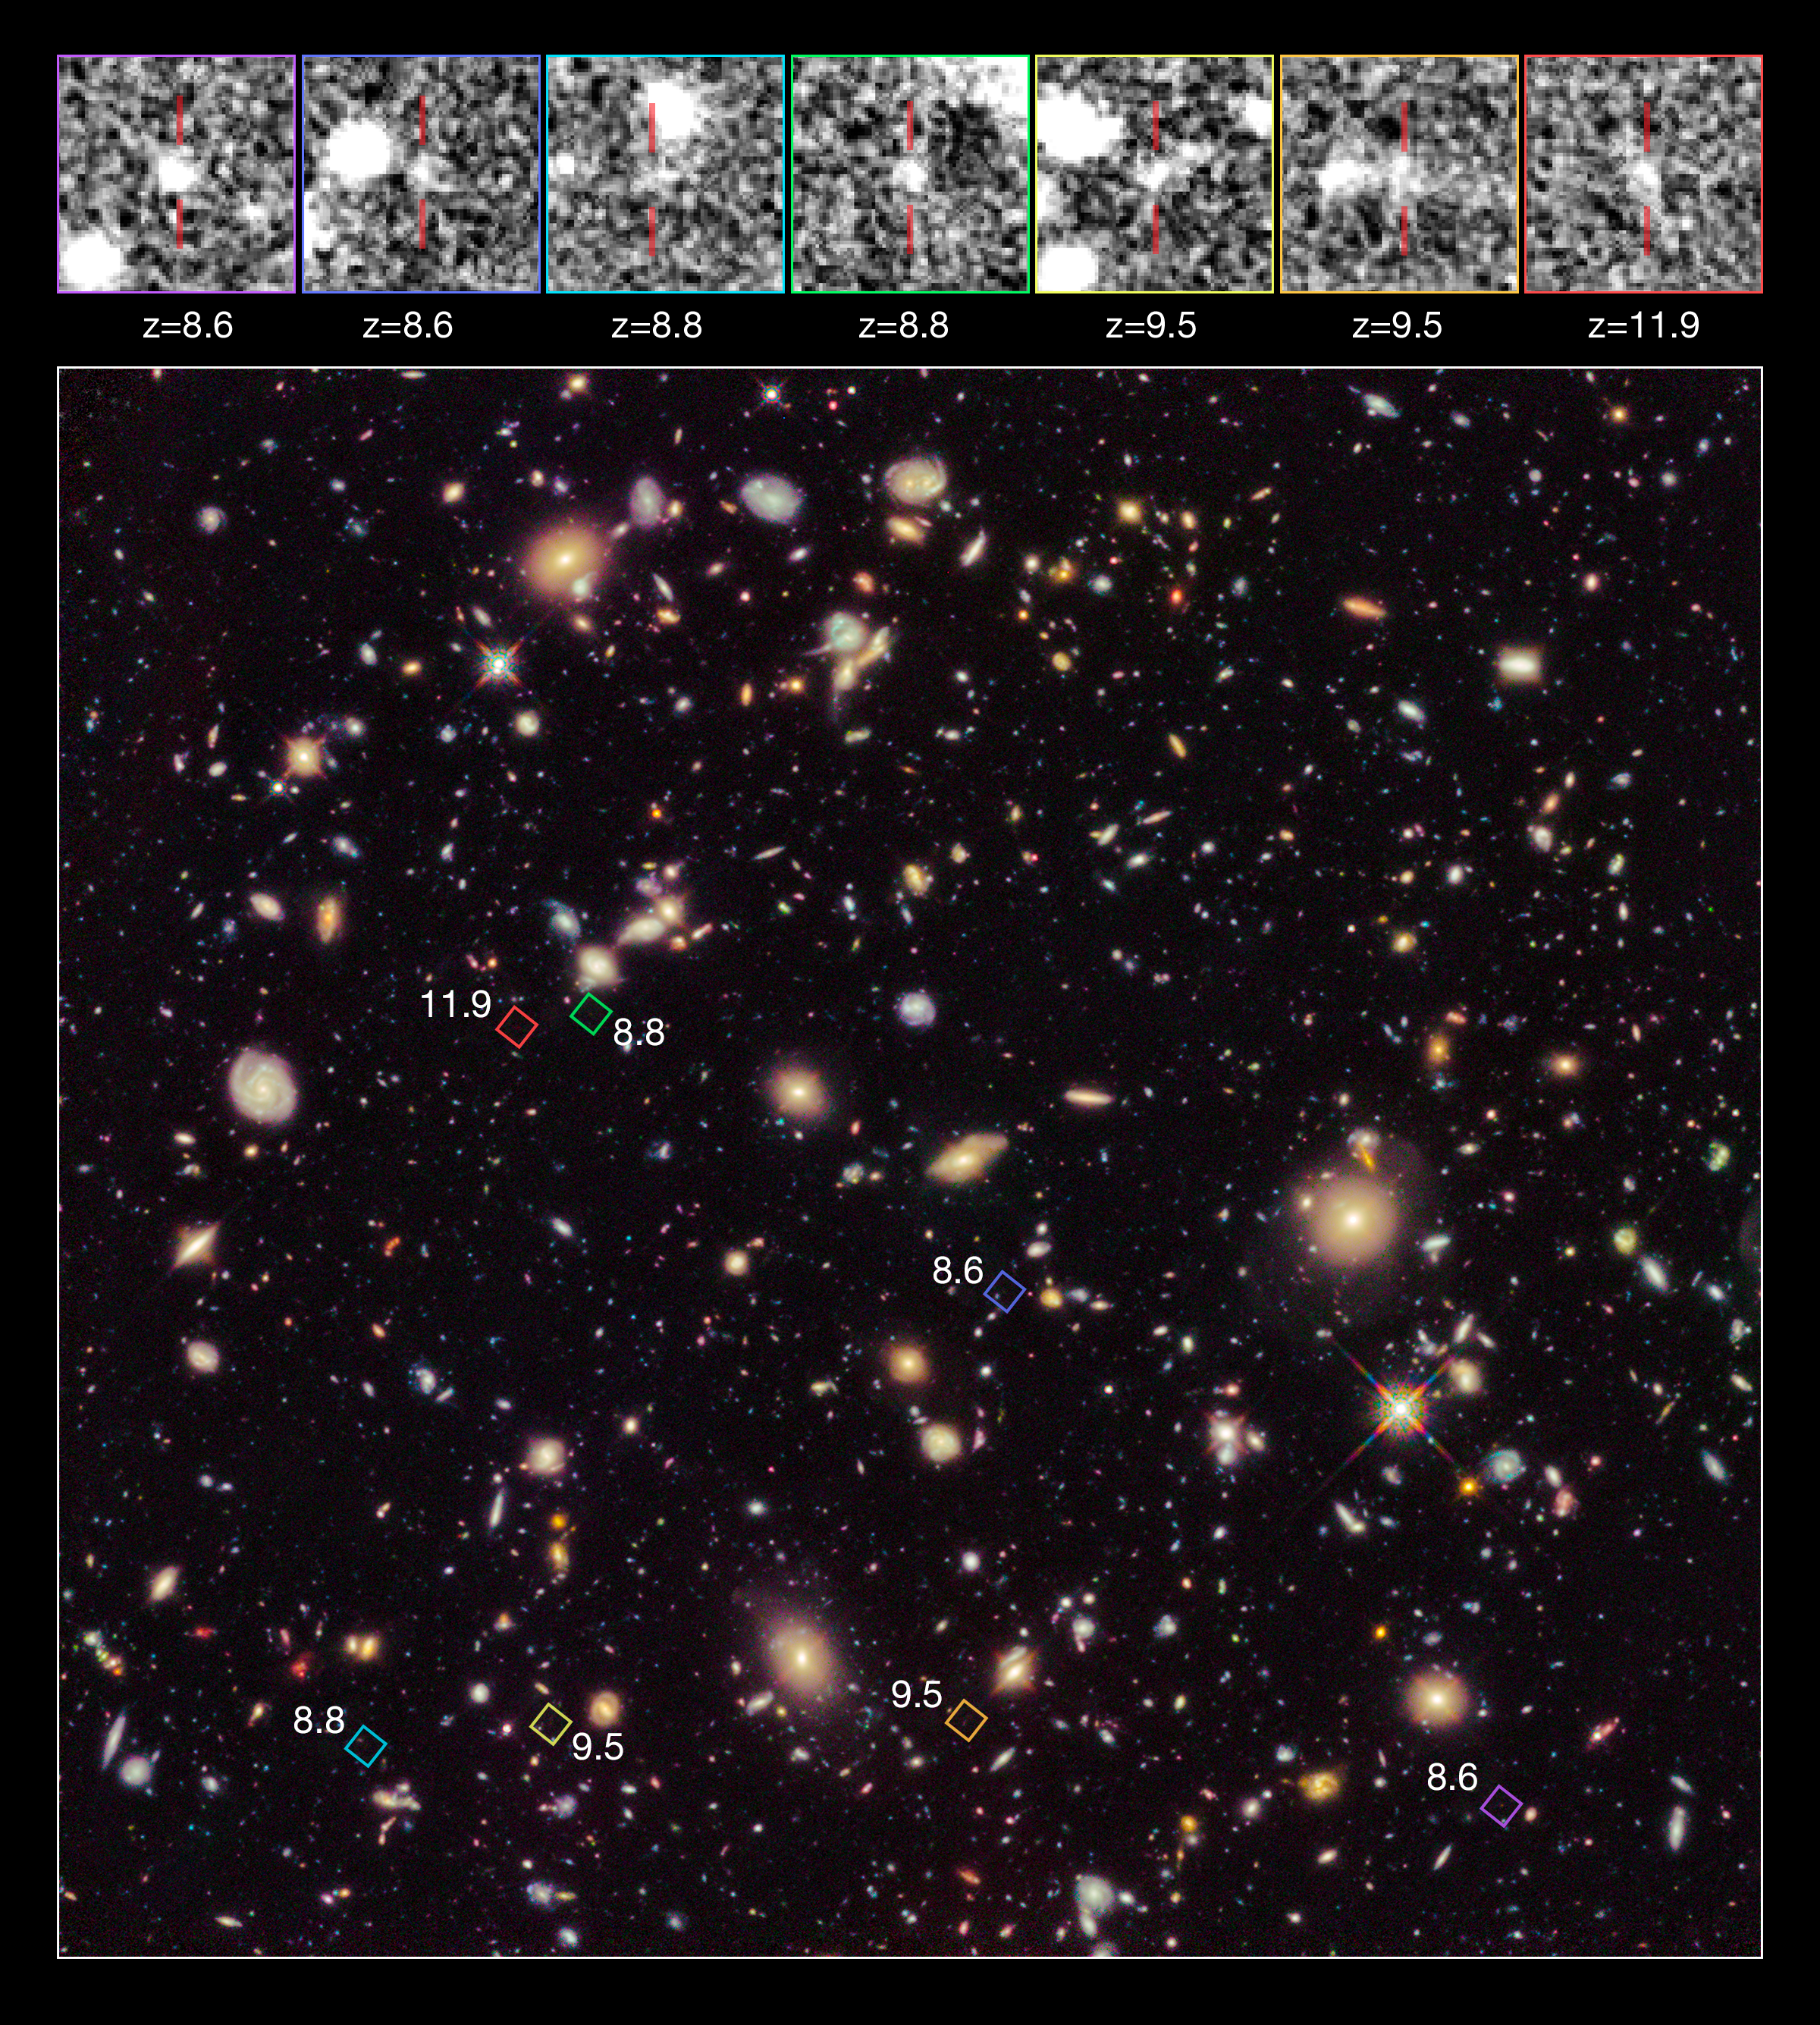

High-redshift galaxy candidates in the Hubble Ultra Deep Field 2012

This image shows the Hubble Ultra Deep Field 2012, an improved version of the Hubble Ultra Deep Field image featuring additional observation time. The new data have revealed for the first time a population of distant galaxies at redshifts between 9 and 12, including the most distant object observed to date. These galaxies are shown at the top of the picture, and their locations are pinpointed in the main image.

These galaxies will require confirmation using spectroscopy by the forthcoming NASA/ESA/CSA James Webb Space Telescope before they are considered to be fully confirmed.

Credit: NASA, ESA, R. Ellis (Caltech), and the HUDF 2012 Team